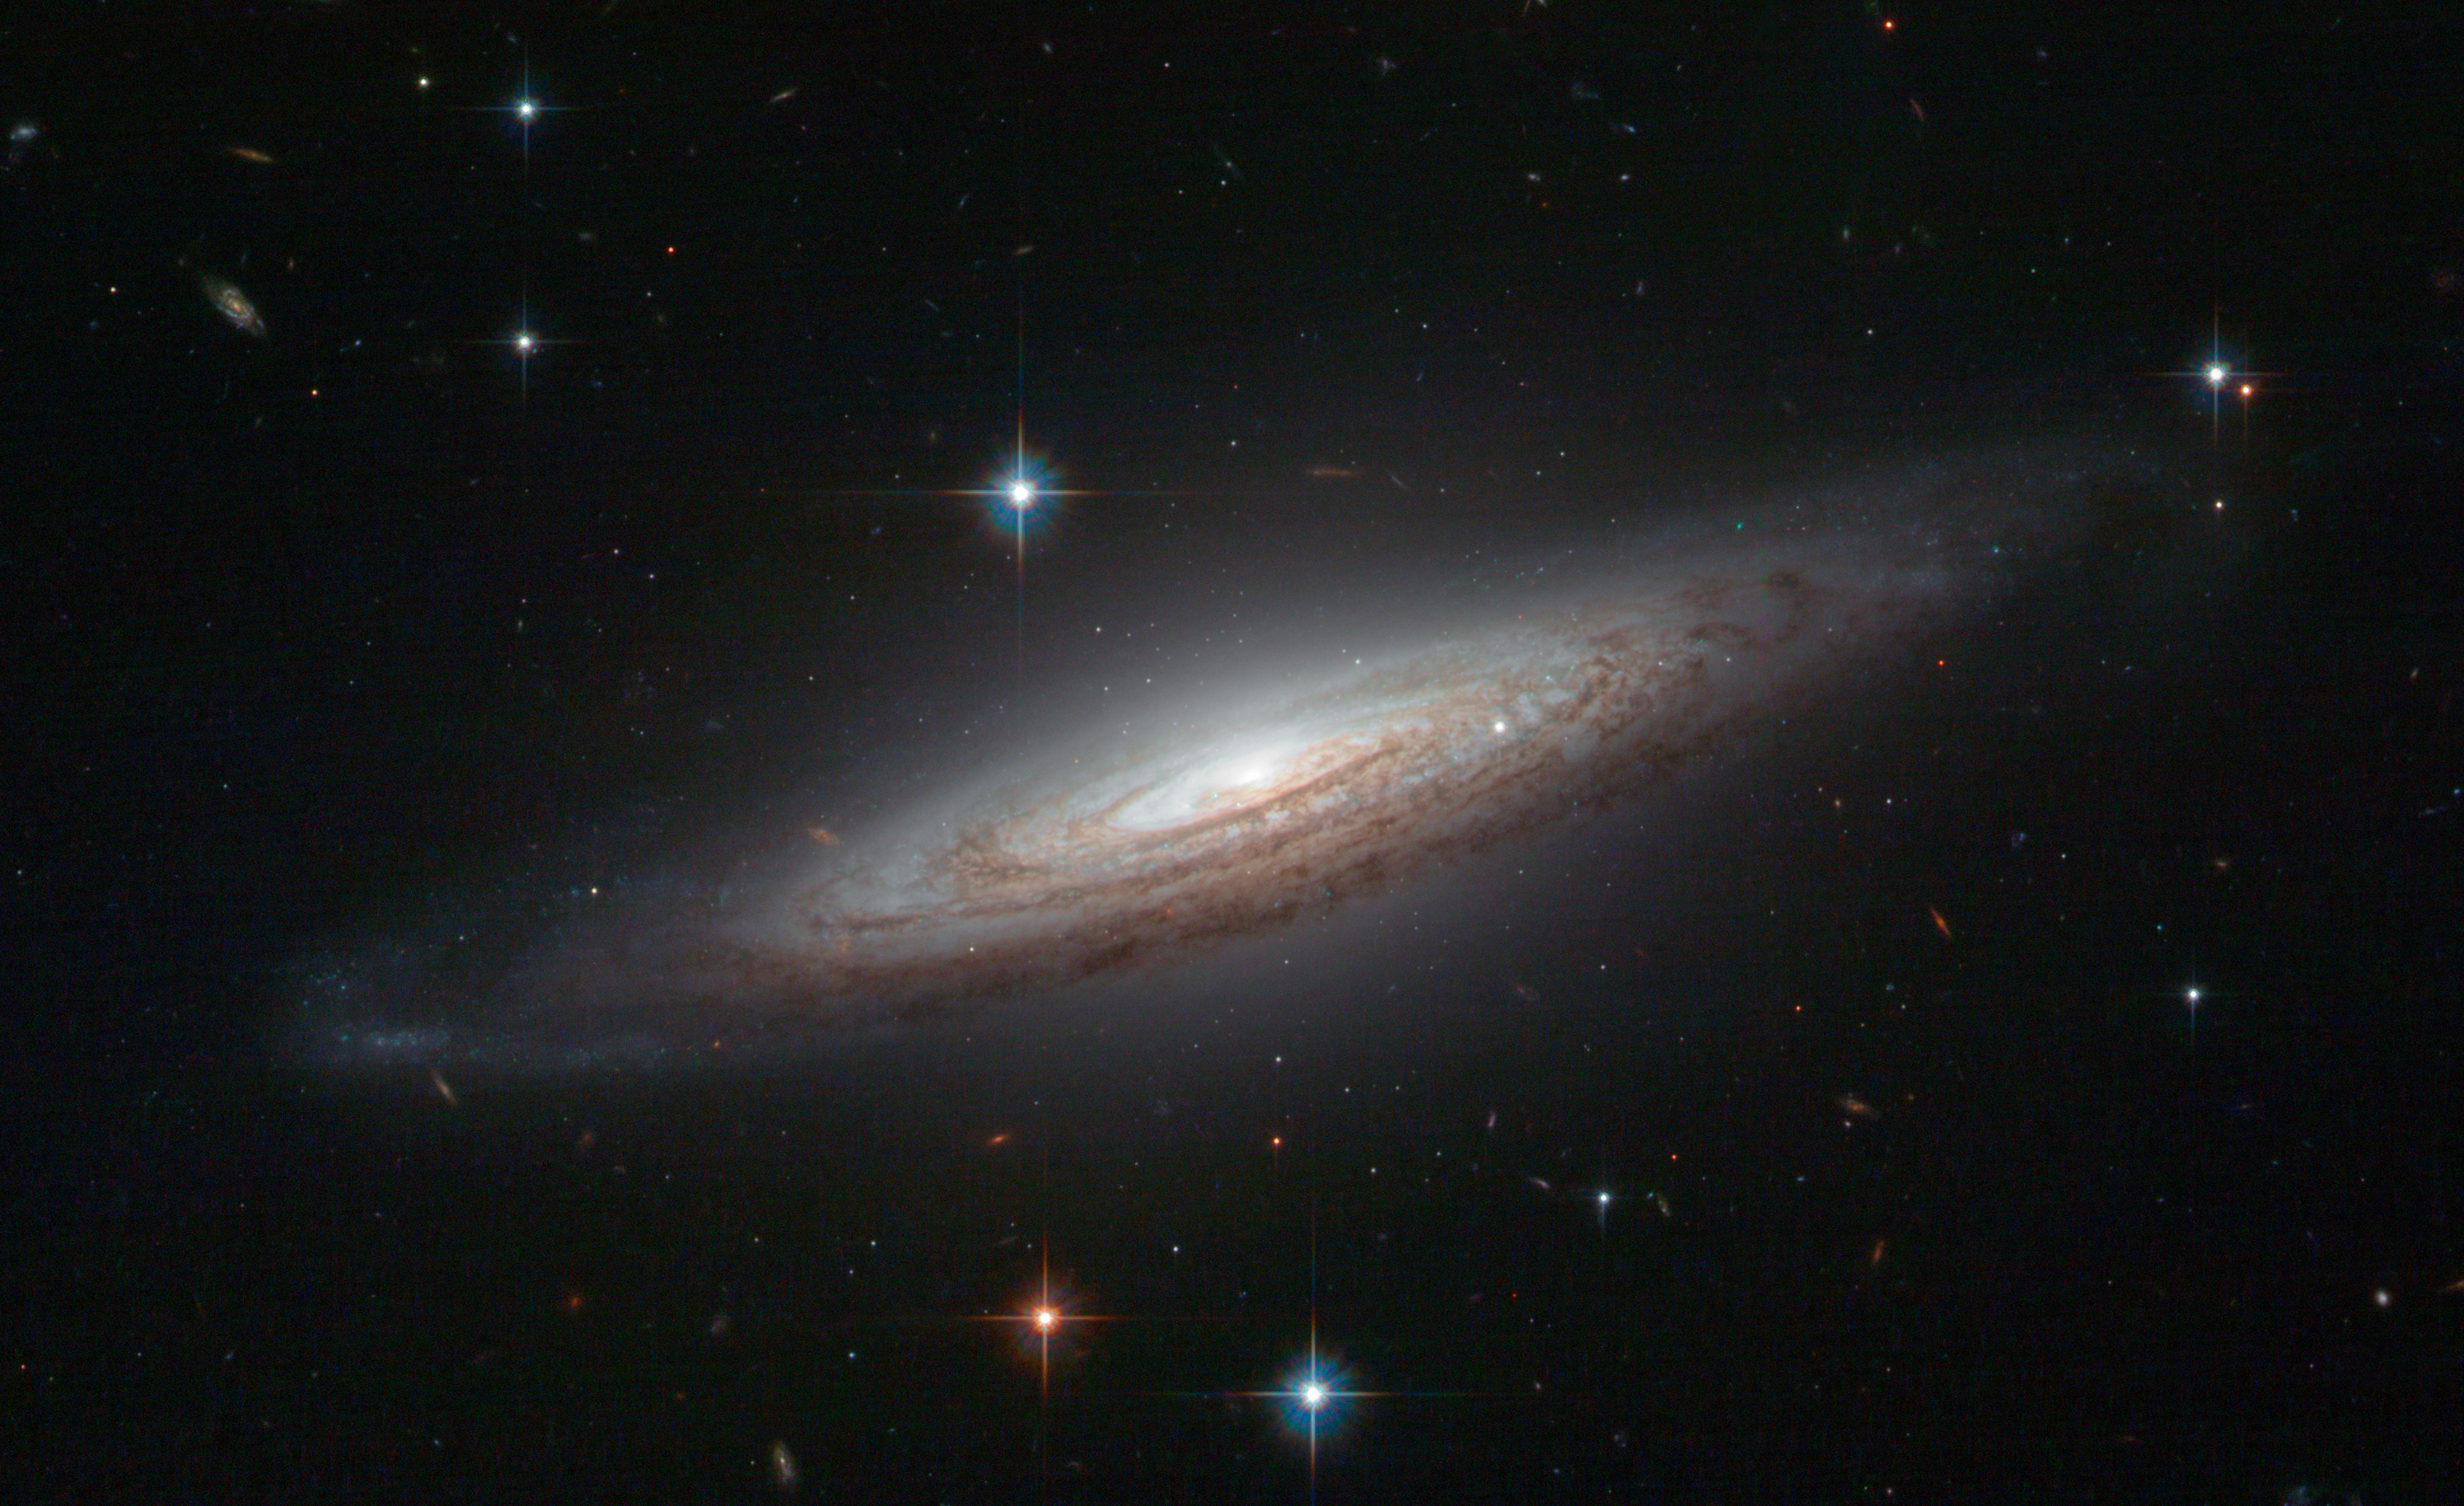

A perfect spiral with an explosive secret

The NASA/ESA Hubble Space Telescope is renowned for its breathtaking images and this snapshot of NGC 634 is definitely that — the fine detail and exceptionally perfect spiral structure of the galaxy make it hard to believe that this is a real observation and not an artist’s impression or a screenshot taken straight from Star Wars.

This spiral galaxy was discovered back in the nineteenth century by French astronomer Édouard Jean-Marie Stephan, but in 2008 it became a prime target for observations thanks to the violent demise of a white dwarf star. The type Ia supernova known as SN2008a was spotted in the galaxy and briefly rivalled the brilliance of its entire host galaxy but, despite the energy of the explosion, it can no longer be seen this Hubble image, which was taken around a year and a half later.

White dwarfs are thought to be the endpoint of evolution for stars between 0.07 to 8 solar masses, which equates to 97% of the stars in the Milky Way. However, there are exceptions to the rule; in a binary system it is possible for a white dwarf to accrete material from the companion star and gradually put on weight. Like a person gorging on junk food, the star can eventually grow too full — when it exceeds 1.38 solar masses nuclear reactions ignite that produce enormous amounts of energy and the star explodes as a type Ia supernova.

This picture was created from images taken with the Wide Field Channel of Hubble’s Advanced Camera for Surveys. Images through a yellow filter (F555W, coloured blue) have been combined with images through red (F625W, coloured green) and near-infrared (F775W, coloured red) filters. The total exposure times per filter were 3750 s, 3530 s and 2484 s, respectively and the field of view is 2.5 x 1.5 arcminutes.

Credit: ESA/Hubble & NASA